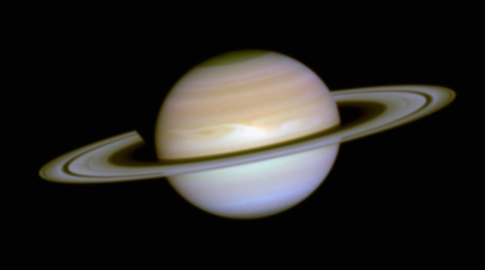

The Aurorae on Saturn

This is a visible-light colour composite image of Saturn as seen by Hubble on December 1, 1994. Unlike the ultraviolet image, Saturn's familiar atmospheric belts and zones are clearly seen. The lower cloud deck is not visible at UV wavelengths because sunlight is reflected from higher in the atmosphere.

Credit: J.T. Trauger (JPL), J.T. Clarke (Univ. of Michigan), the WFPC2science team, and NASA/ESA